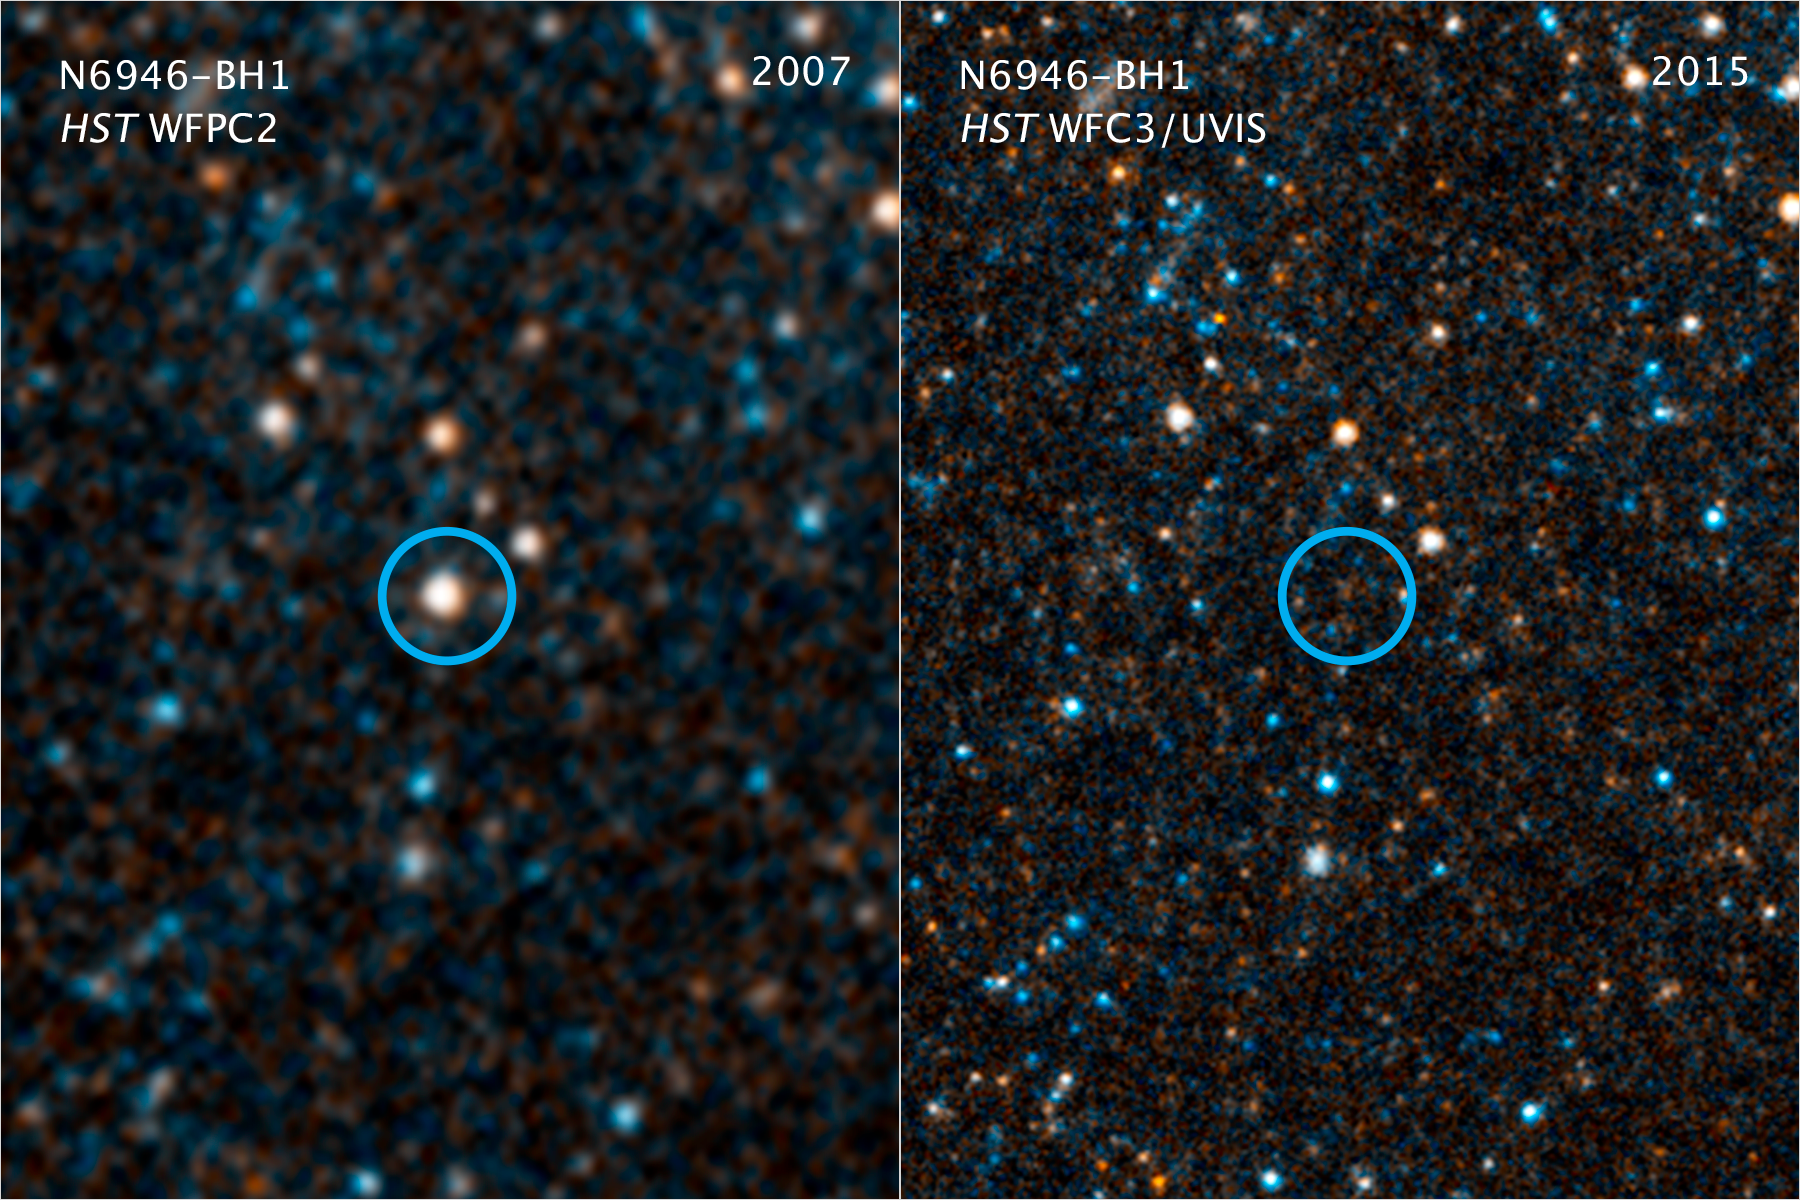

N6946-BH1

This pair of visible-light and near-infrared images taken with the NASA/ESA Hubble Space Telescope show the giant star N6946-BH1 before and after it vanished out of sight by imploding to form a black hole. The left image shows the 25 solar mass star as it looked in 2007. In 2009, the star shot up in brightness to become over 1 million times more luminous than our Sun for several months. But then it seemed to vanish, as seen in the right panel image from 2015. A small amount of infrared light has been detected from where the star used to be. This radiation probably comes from debris falling onto a black hole. The black hole is located 22 million light-years away in the spiral galaxy NGC 6946.

Credit: NASA, ESA, and C. Kochanek (OSU)